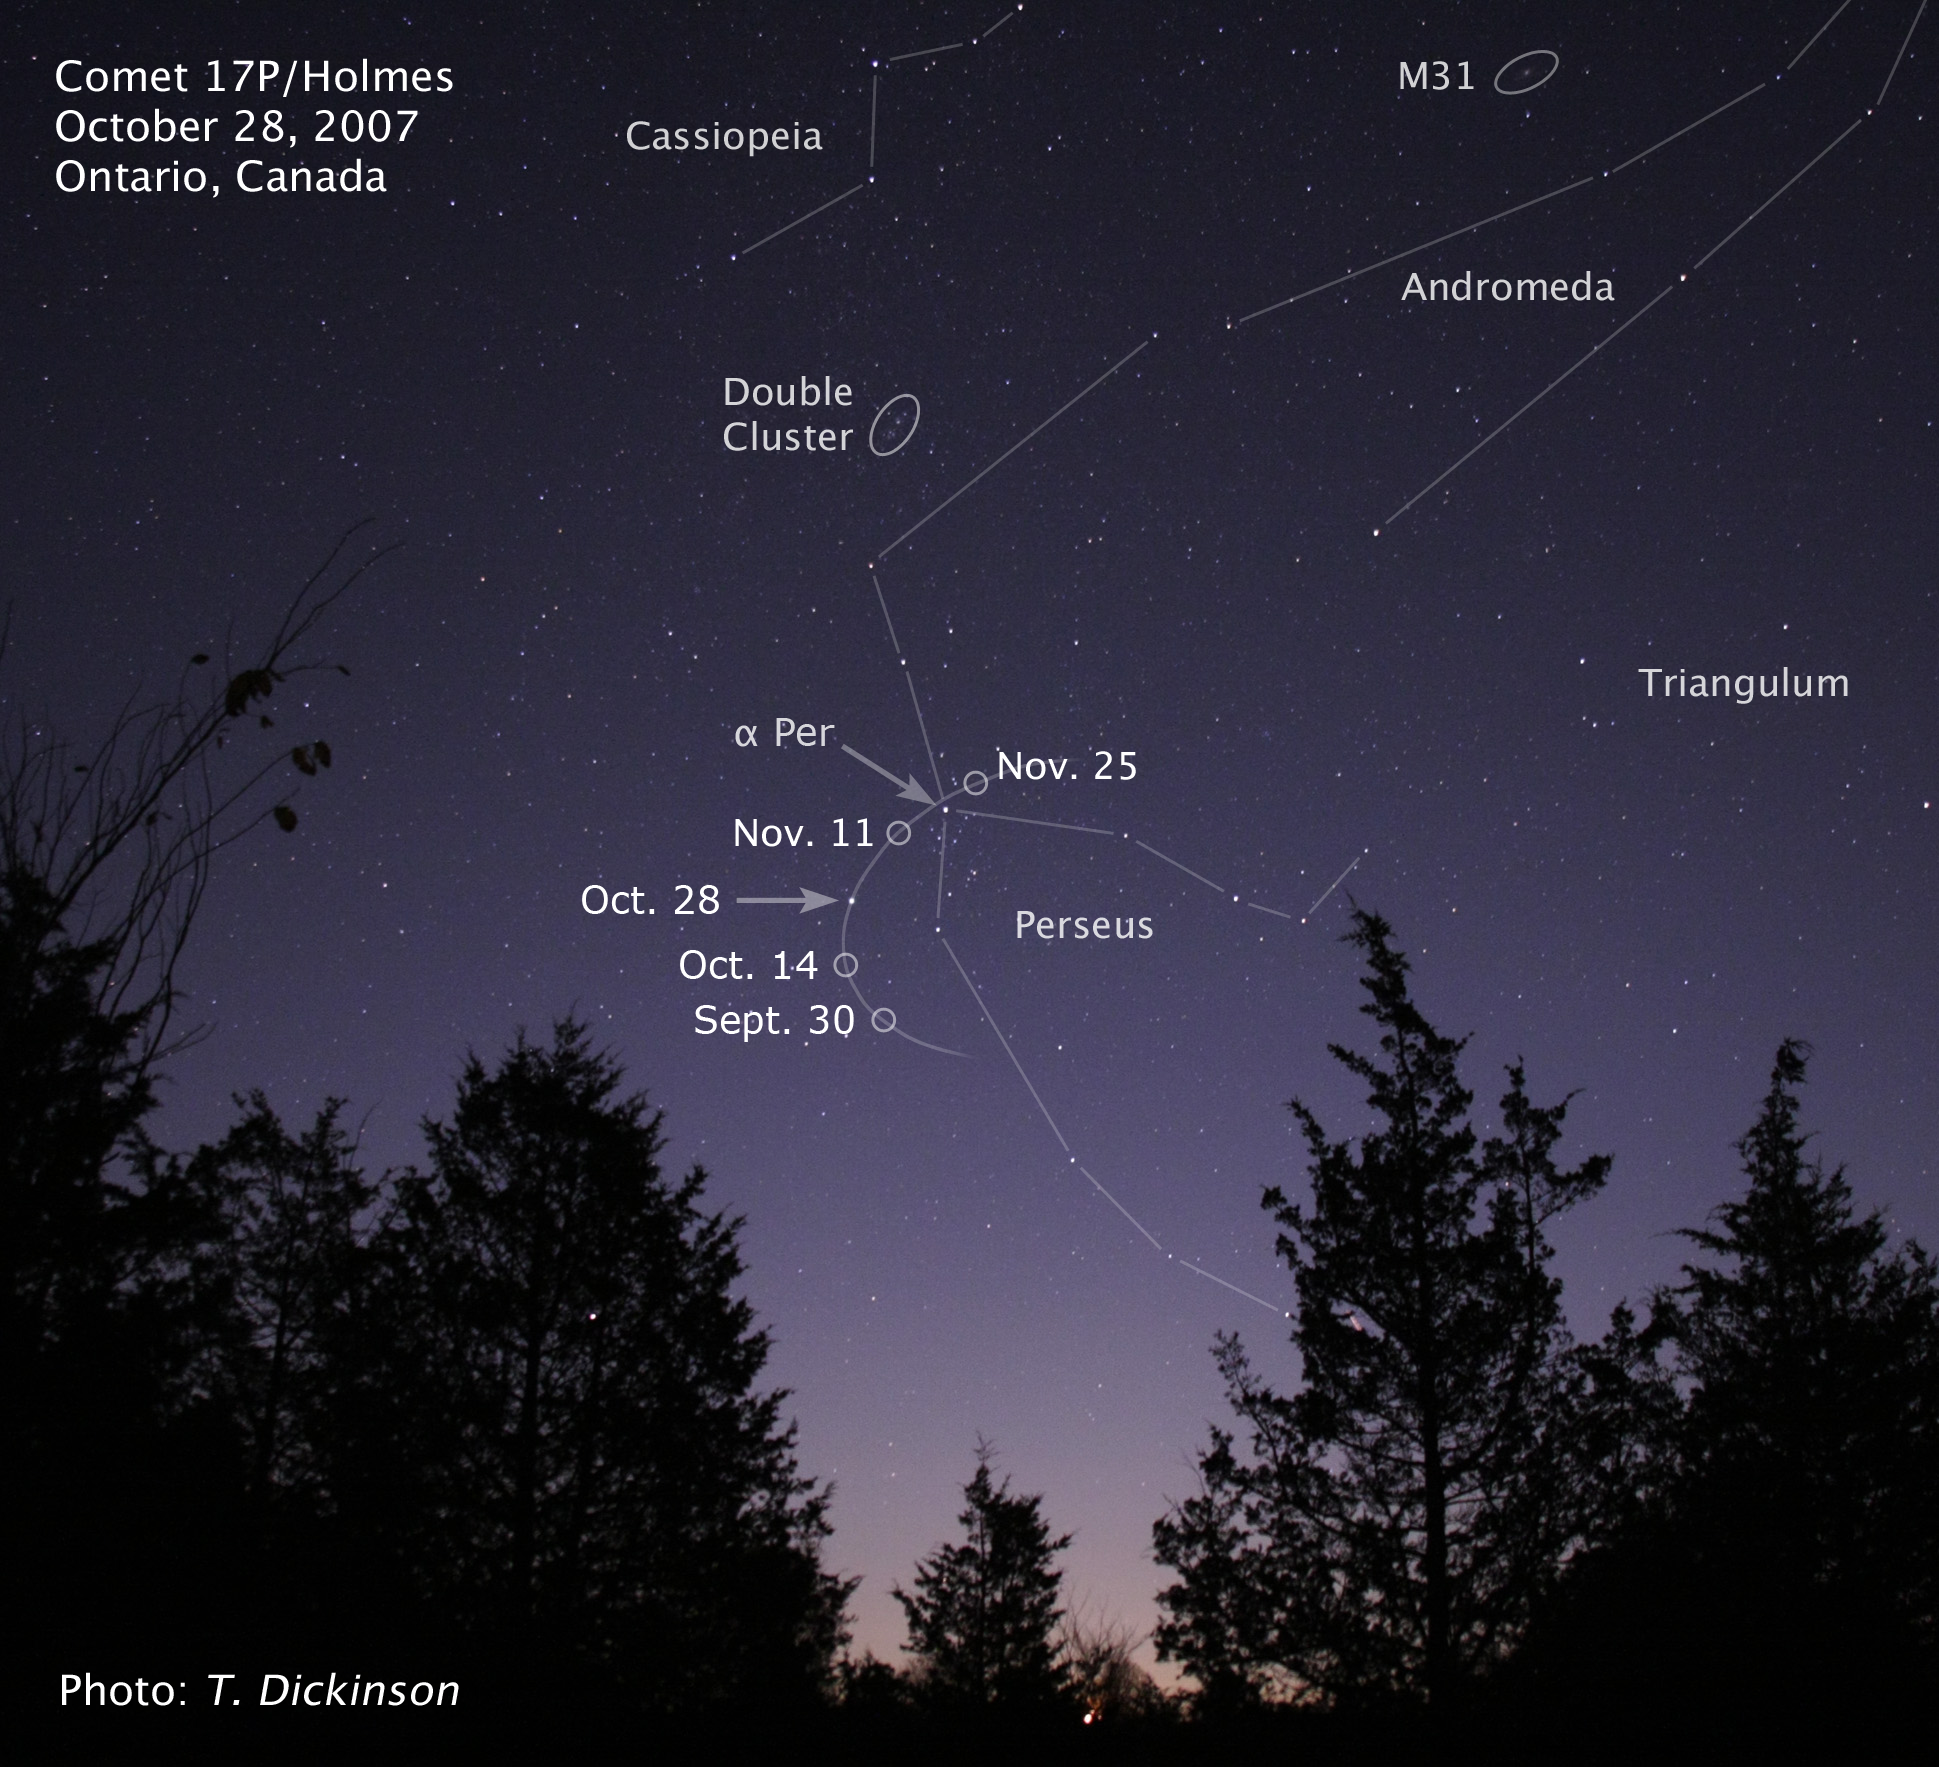

Ground-based image of Comet 17P/Holmes

This image, taken by an amateur astronomer, shows the location of Comet Holmes on 28 Oct. Superimposed on this image is a graphic showing the comet's path from 30 Sept. to 25 Nov.

Credit: T. Dickinson, Ontario, Canada